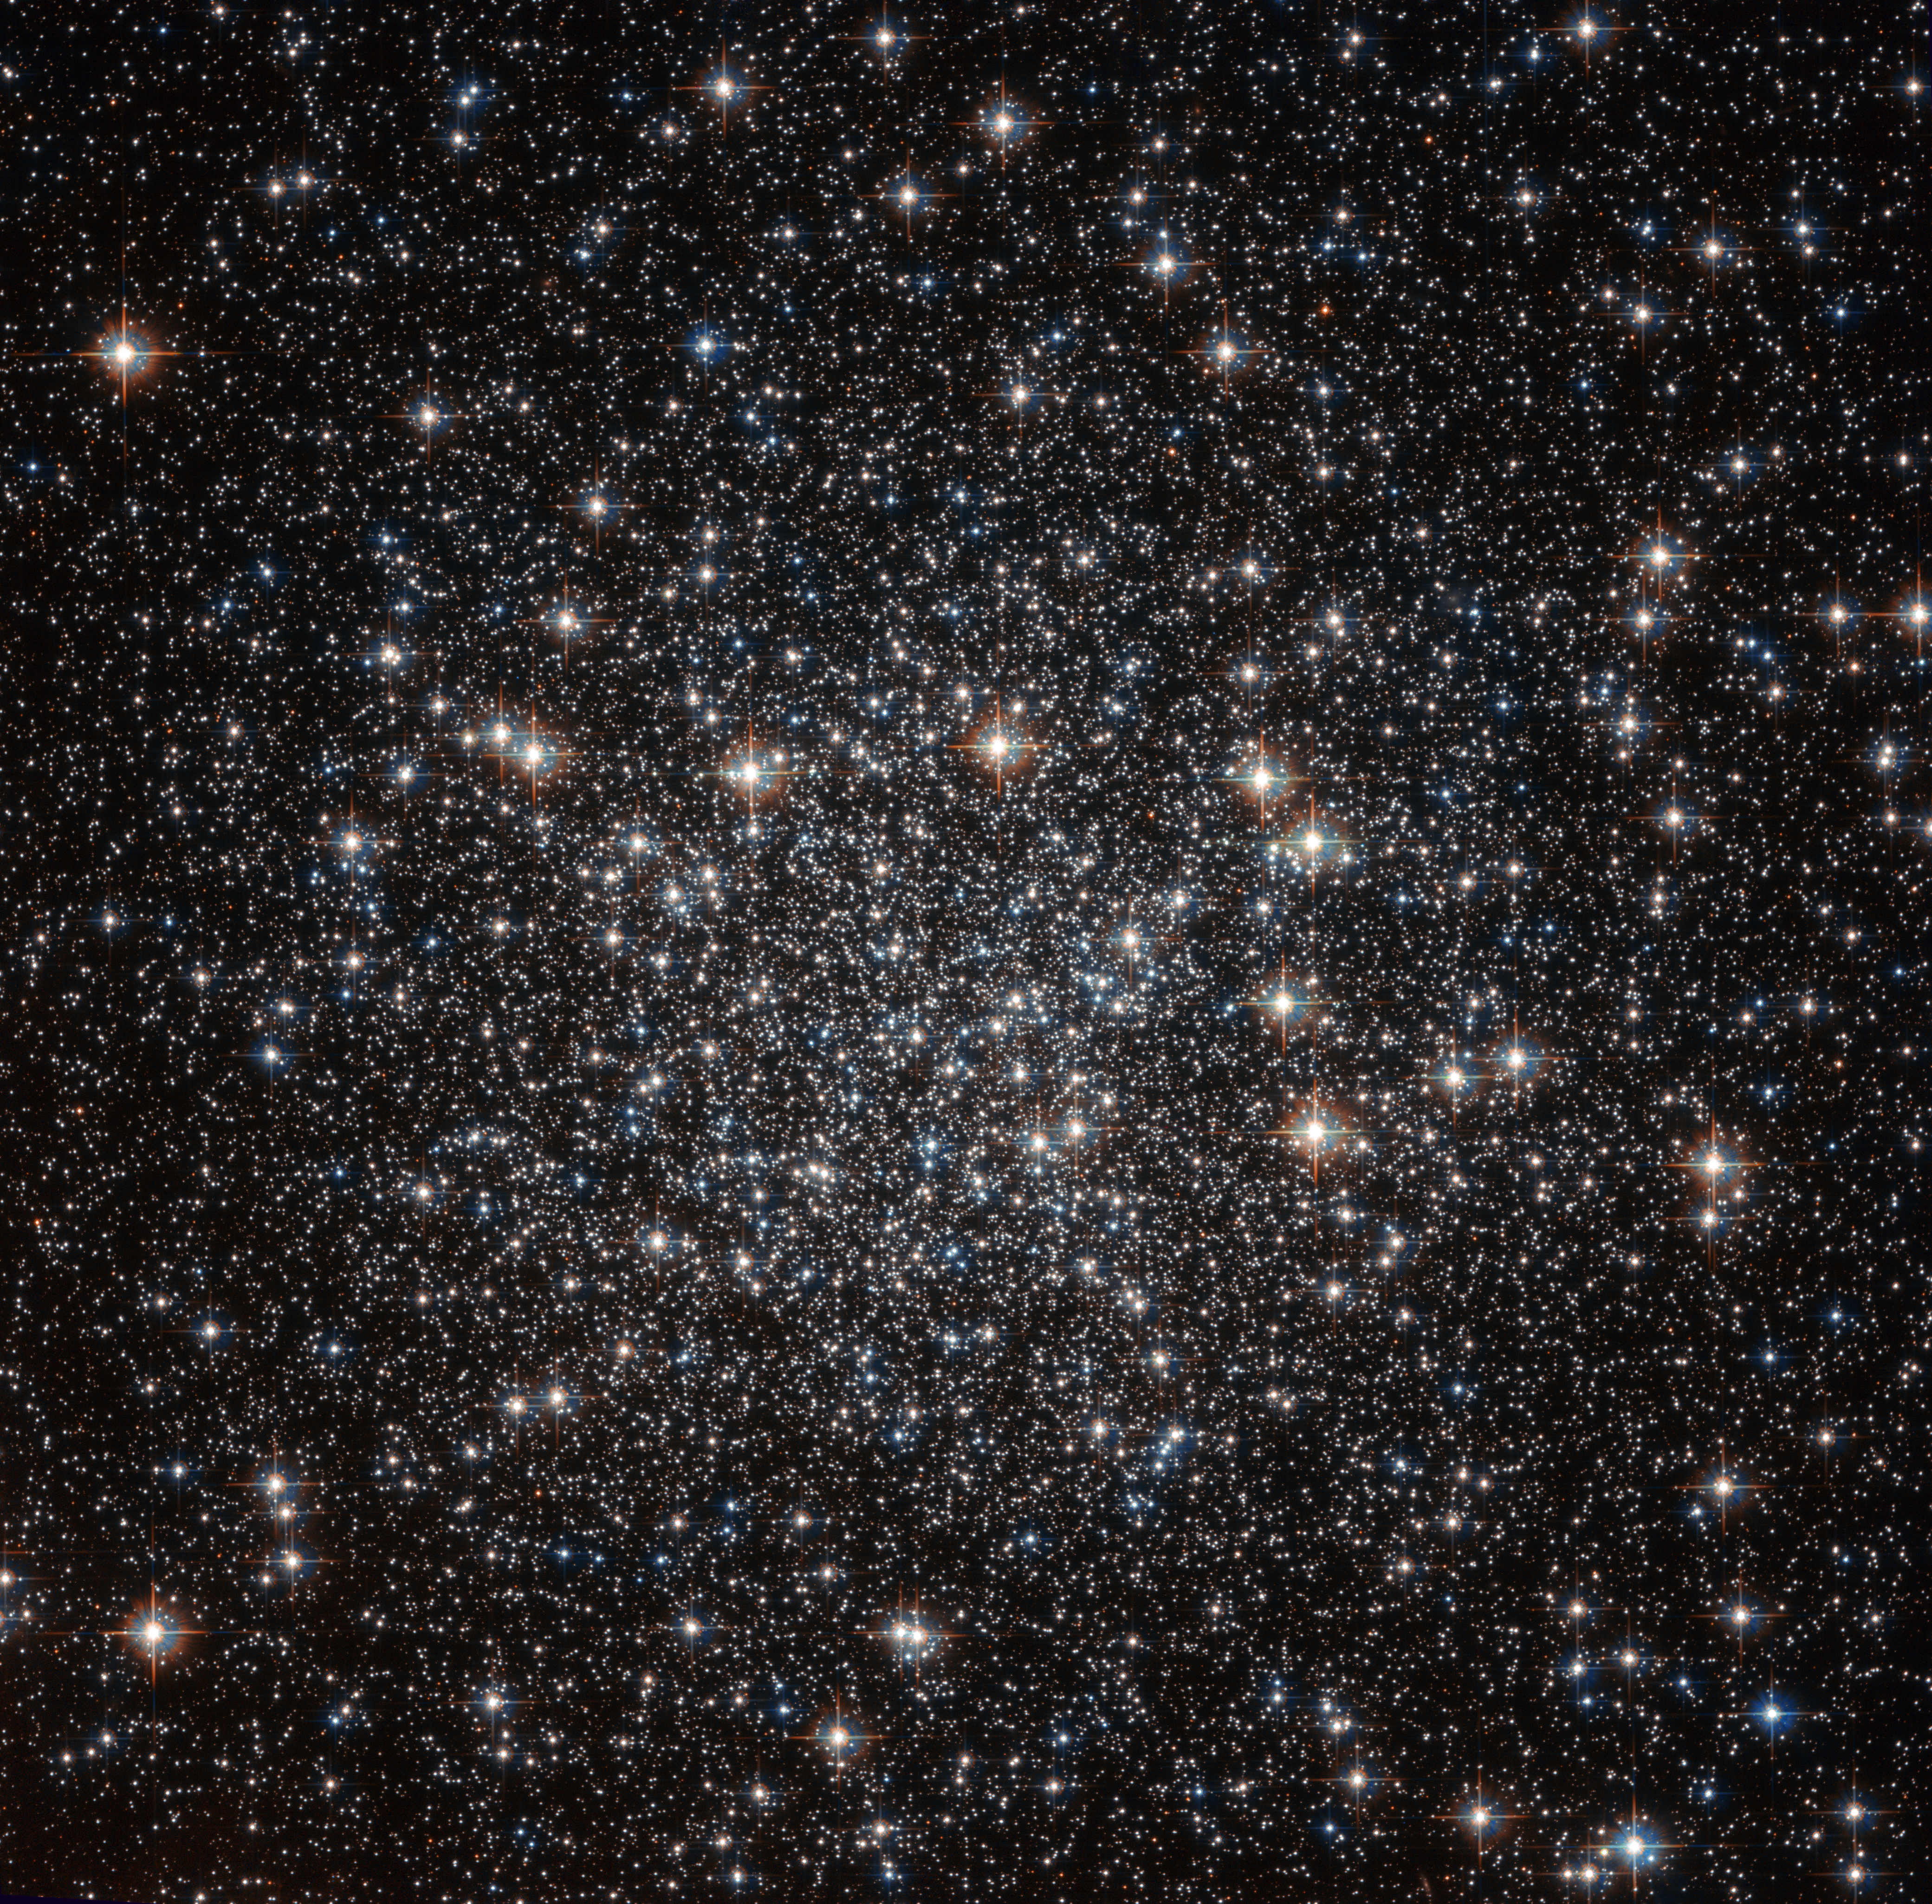

A sky full of stars

Located approximately 22 000 light-years away in the constellation of Musca (The Fly), this tightly packed collection of stars — known as a globular cluster — goes by the name of NGC 4833. This NASA/ESA Hubble Space Telescope image shows the dazzling stellar group in all its glory.

NGC 4833 is one of the over 150 globular clusters known to reside within the Milky Way. These objects are thought to contain some of the oldest stars in our galaxy. Studying these ancient cosmic clusters can help astronomers to unravel how a galaxy formed and evolved, and give an idea of the galaxy’s age.

Globular clusters are responsible for some of the most striking sights in the cosmos, with hundreds of thousands of stars congregating in the same region of space. Hubble has observed many of these clusters during its time in orbit around our planet, each as breathtaking as the last.

Credit: ESA/Hubble and NASA